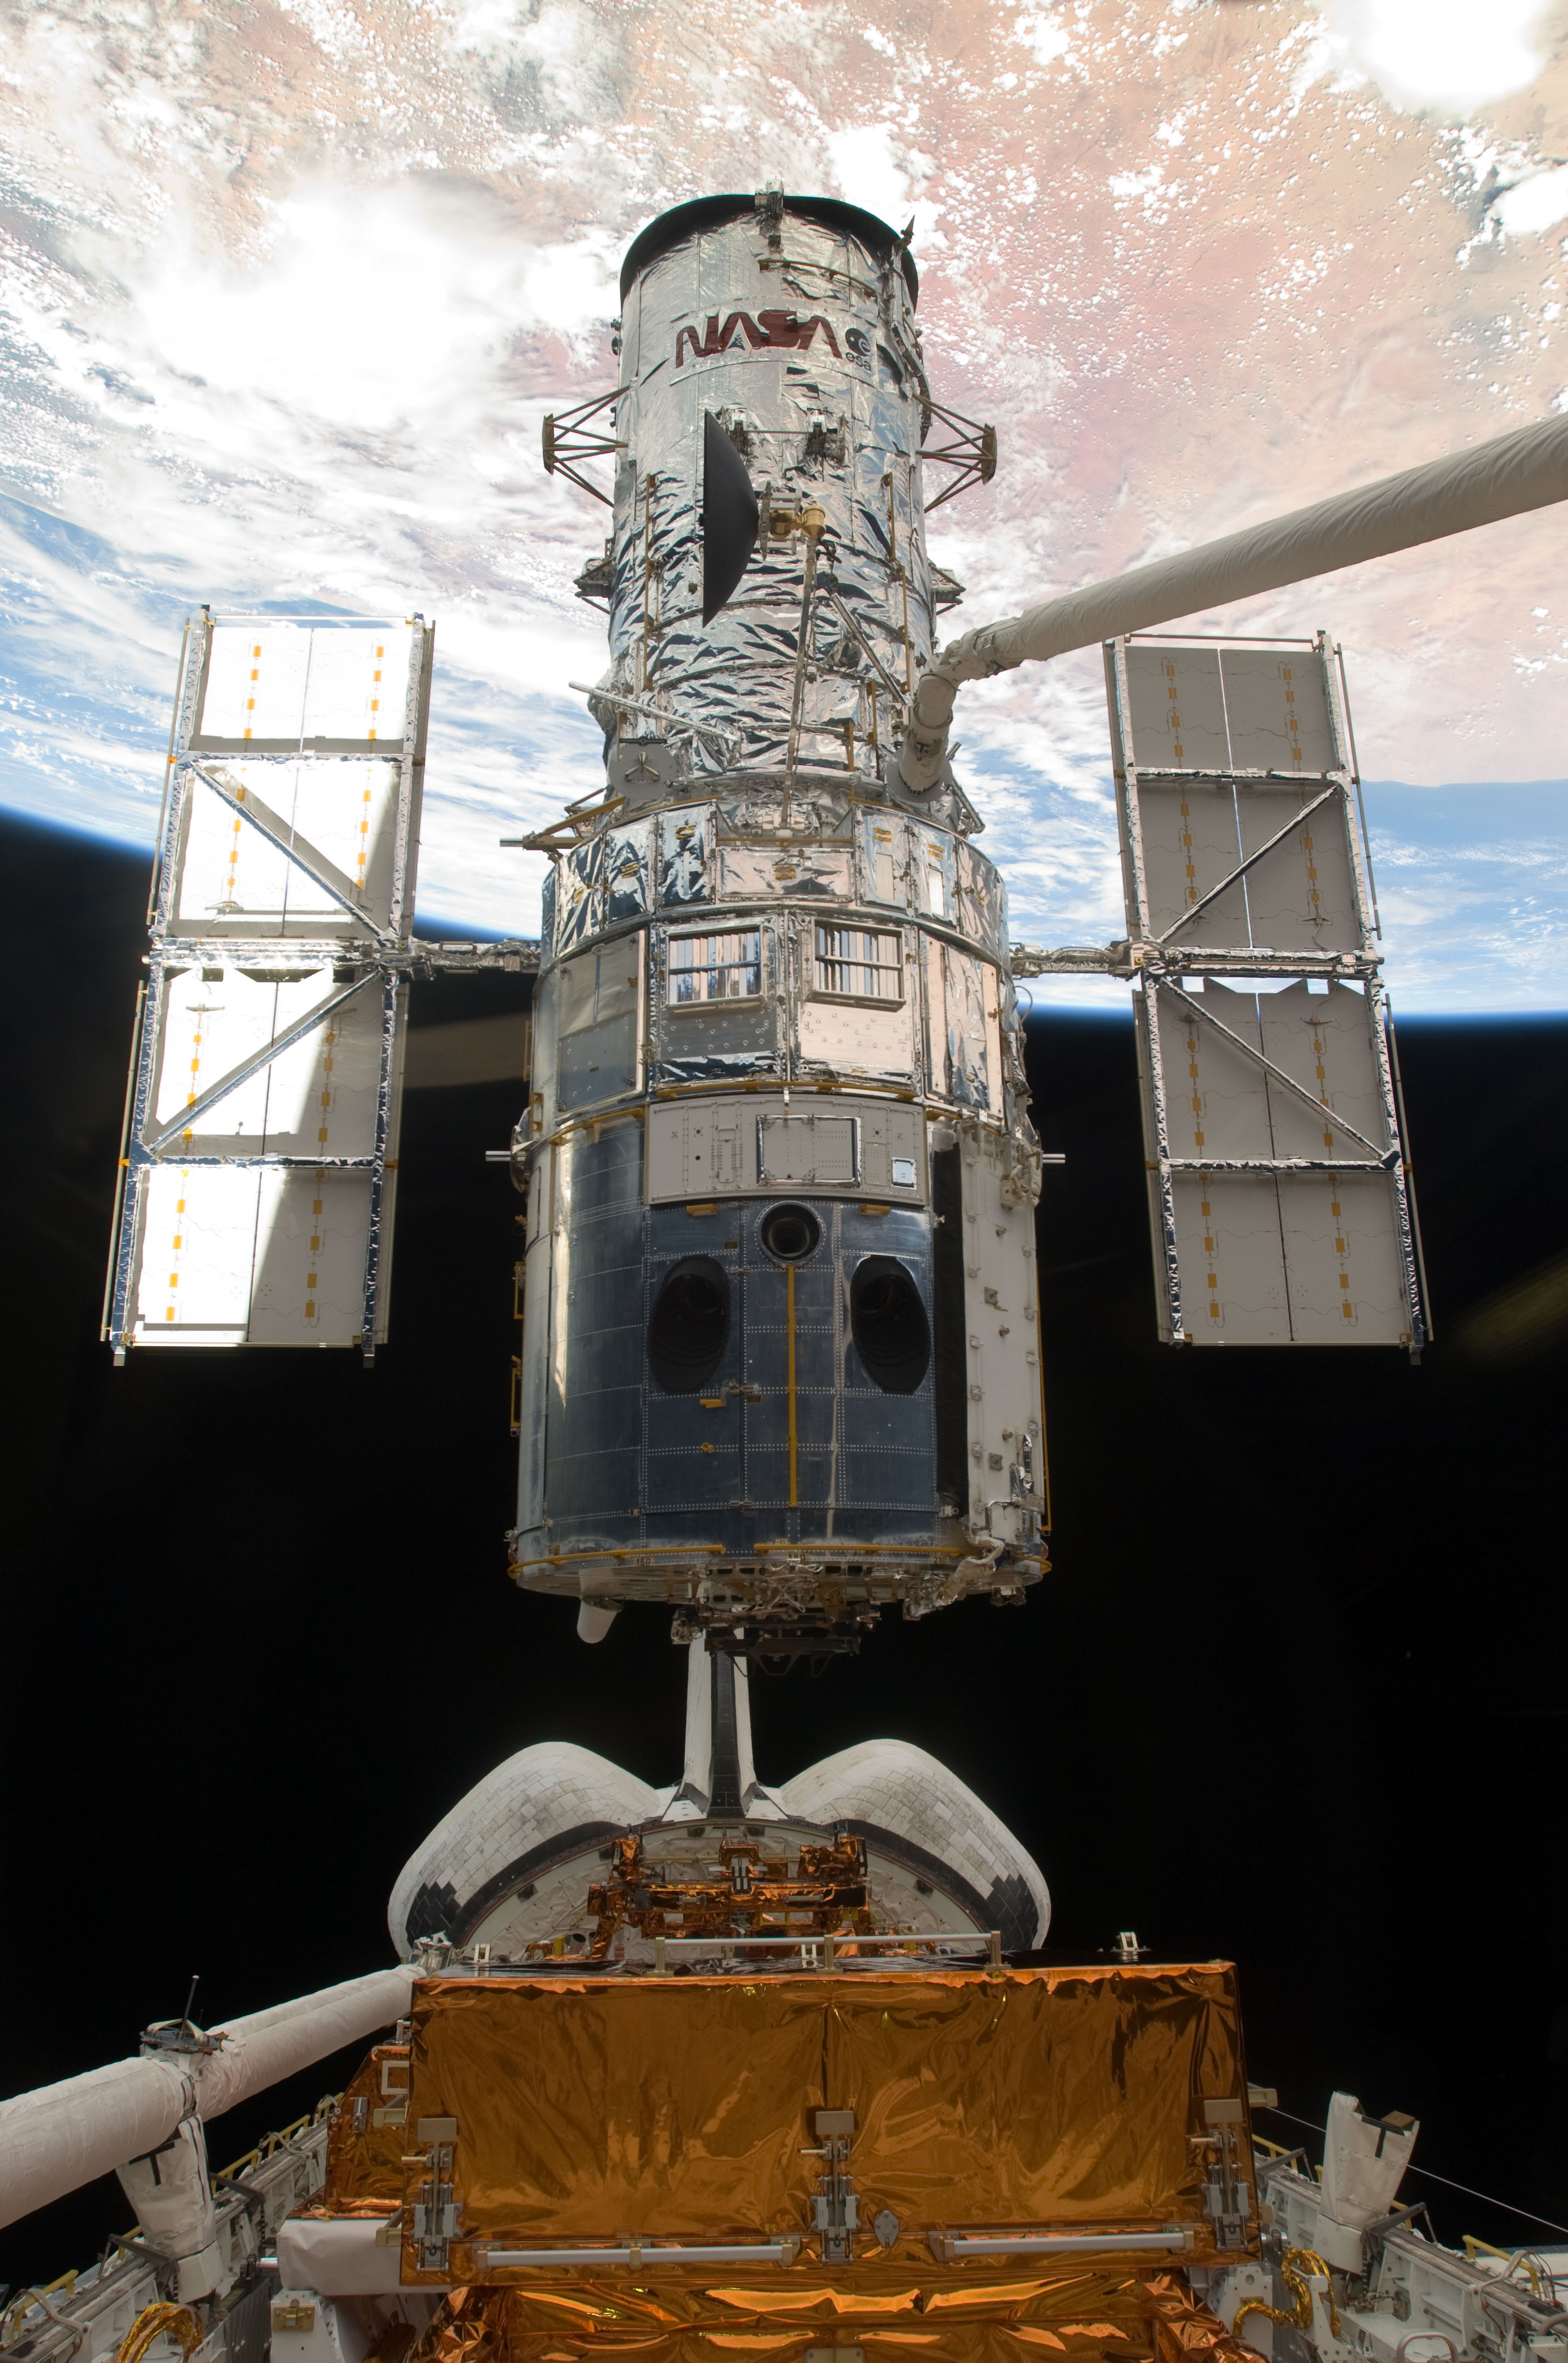

SM4: Hubble Space Telescope just before astronauts released it

S125-E-011766 (19 May 2009) --- The Space Shuttle Atlantis' remote manipulator system arm lifts the Hubble Space Telescope from the cargo bay and is moments away from releasing the orbital observatory to start it on its way back home to observe the universe.

Credit: NASA